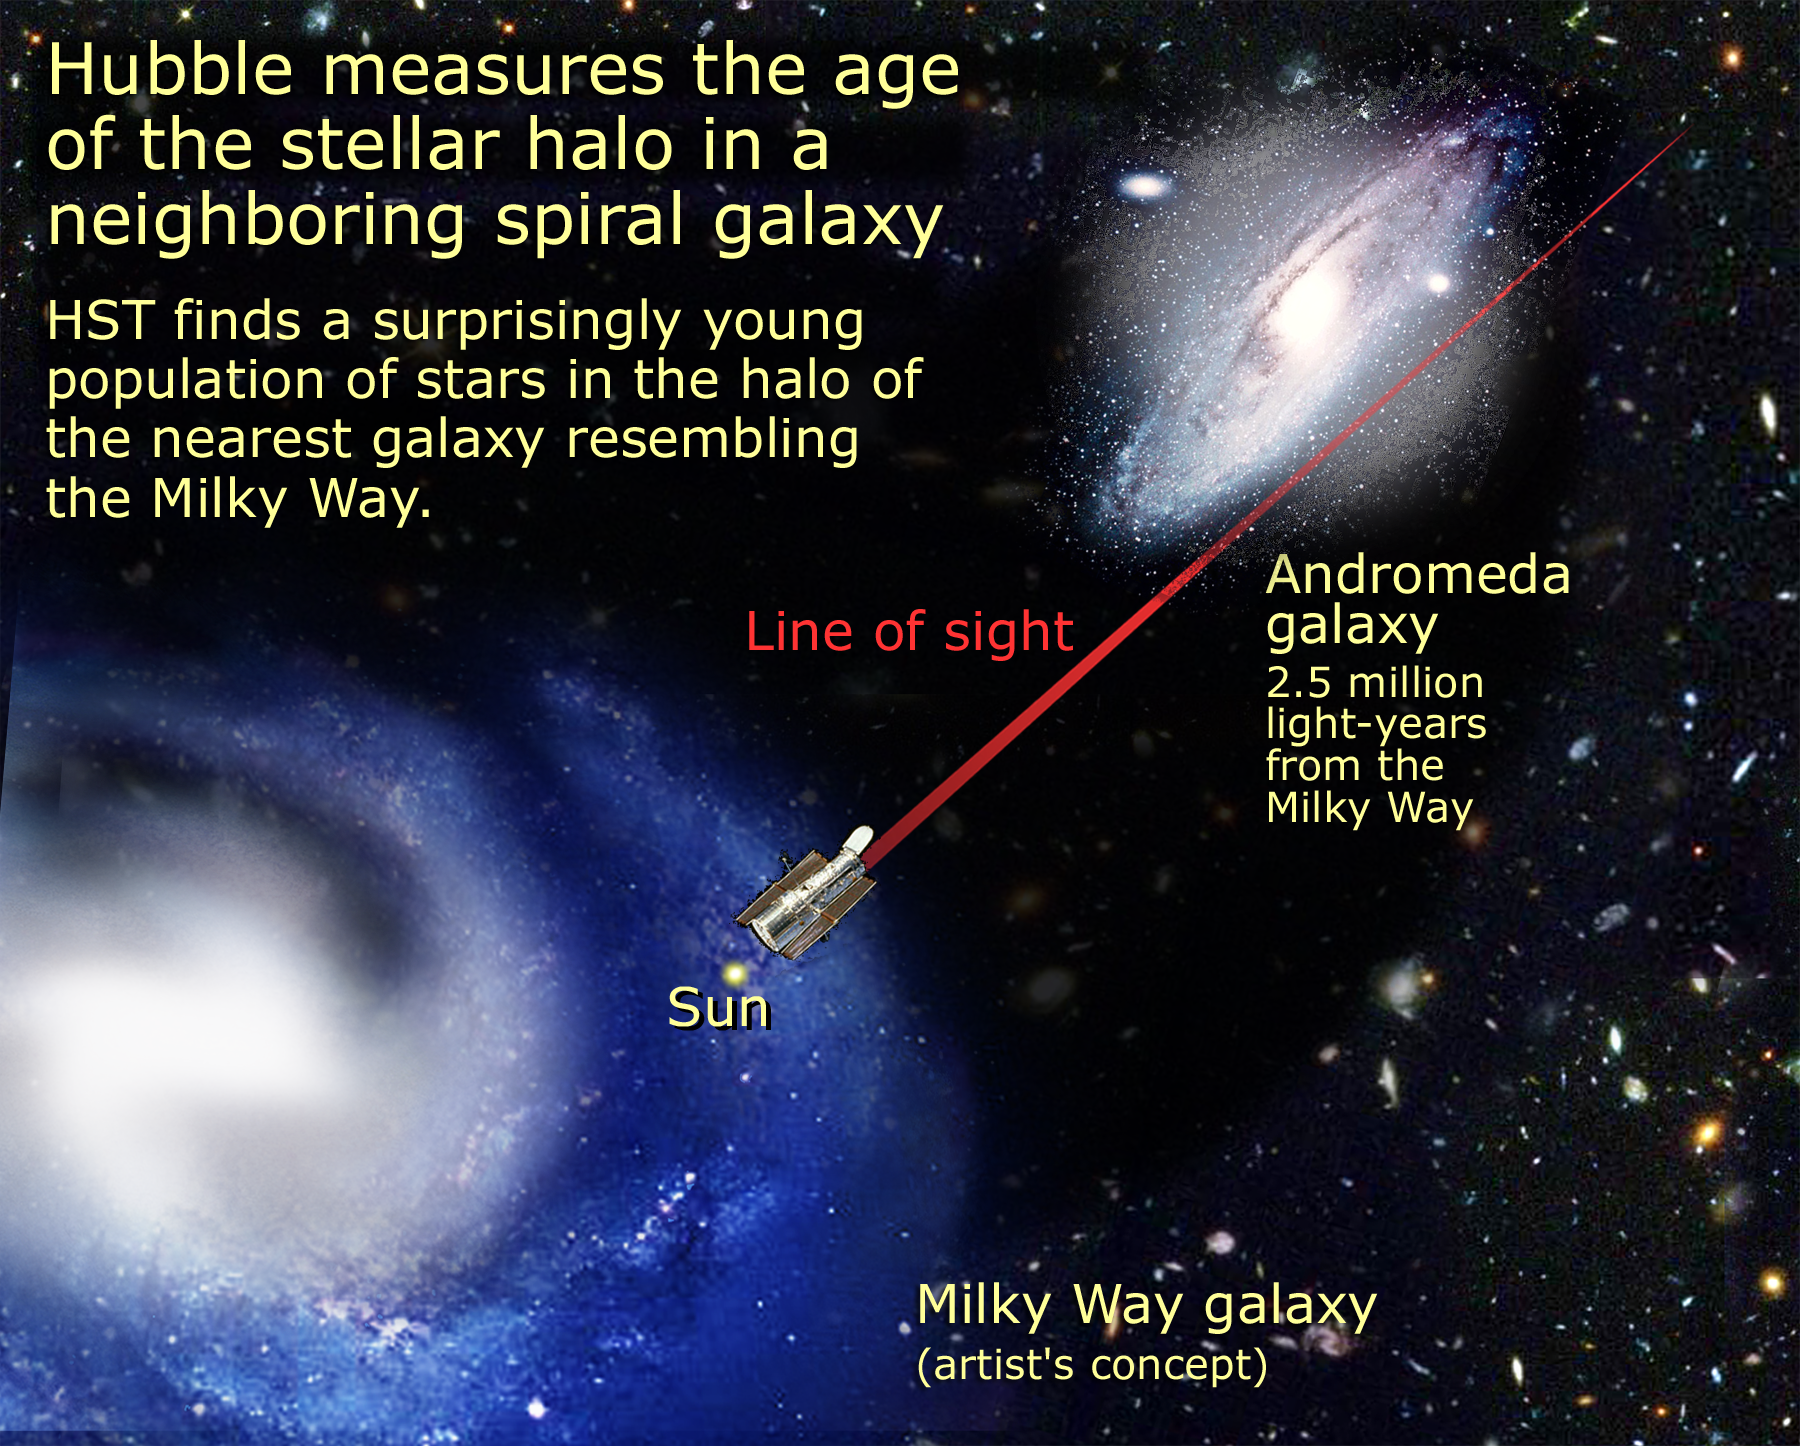

Relative location of M31 and Milky Way

Relying on the deepest visible-light images ever taken in space, astronomers using NASA's Hubble Space Telescope (HST) have reliably measured the age of the spherical halo of stars surrounding the neighboring Andromeda galaxy (M31).

Credit: NASA/ESA and A. Feild (STScI)